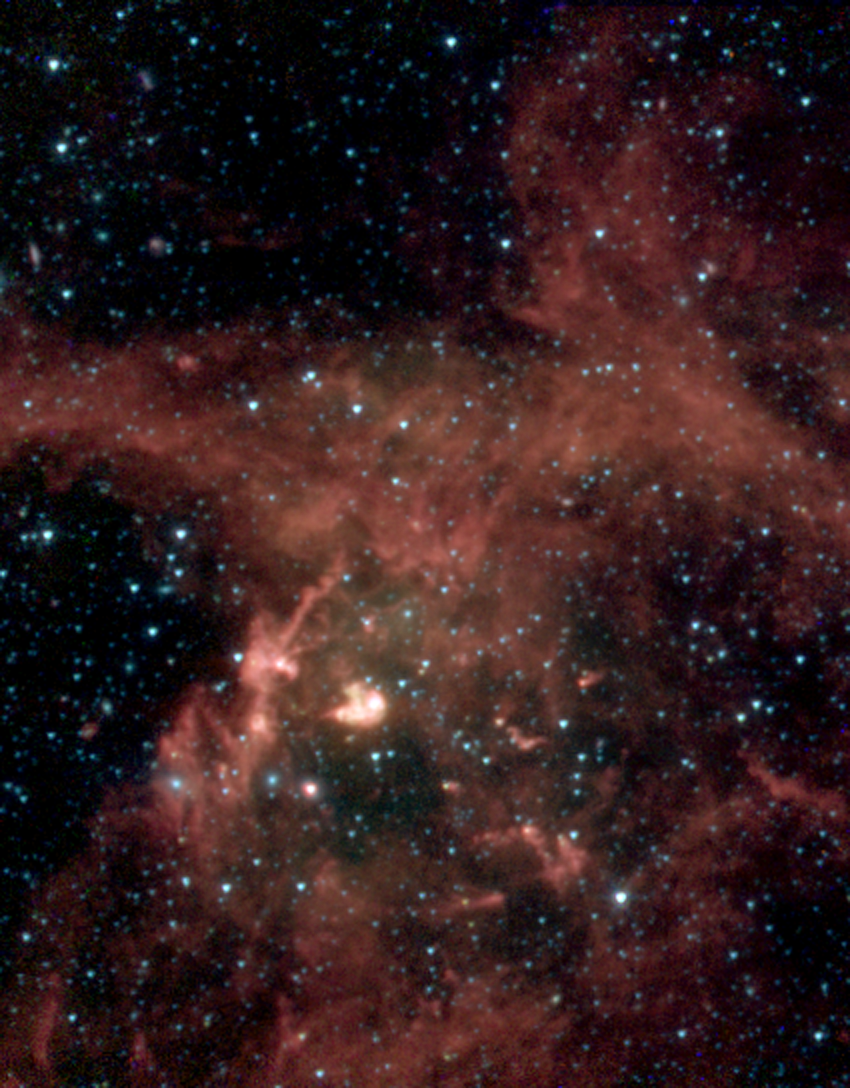

N 63A: Spitzer Space Telescope

Spitzer has imaged the supernova remnant, N 63A, at infrared wavelengths. Using the IRAC detector, the image shows infrared emission at 3.6 (blue), 4.5 (green), 5.8 (orange), 8.0 (red) microns.

Credit: NASA/JPL-Caltech/Y.-H. Chu (UIUC)